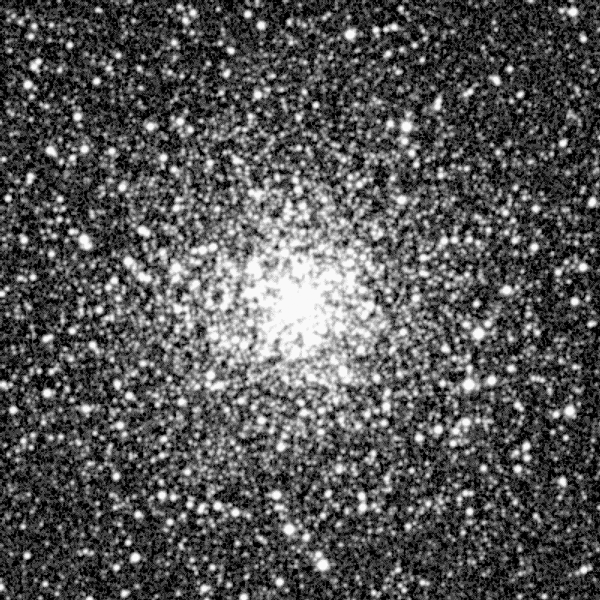

NGC 6397

A ground-based sky survey photograph of the globular cluster NGC 6397, one of the nearest and densest agglomerations of stars to Earth. The cluster is located 7, 200 light-years away in the southern constellation Ara, and is one of 150 such objects which orbit our Milky Way Galaxy.

Credit: F. Paresce, ST ScI & ESA and NASA